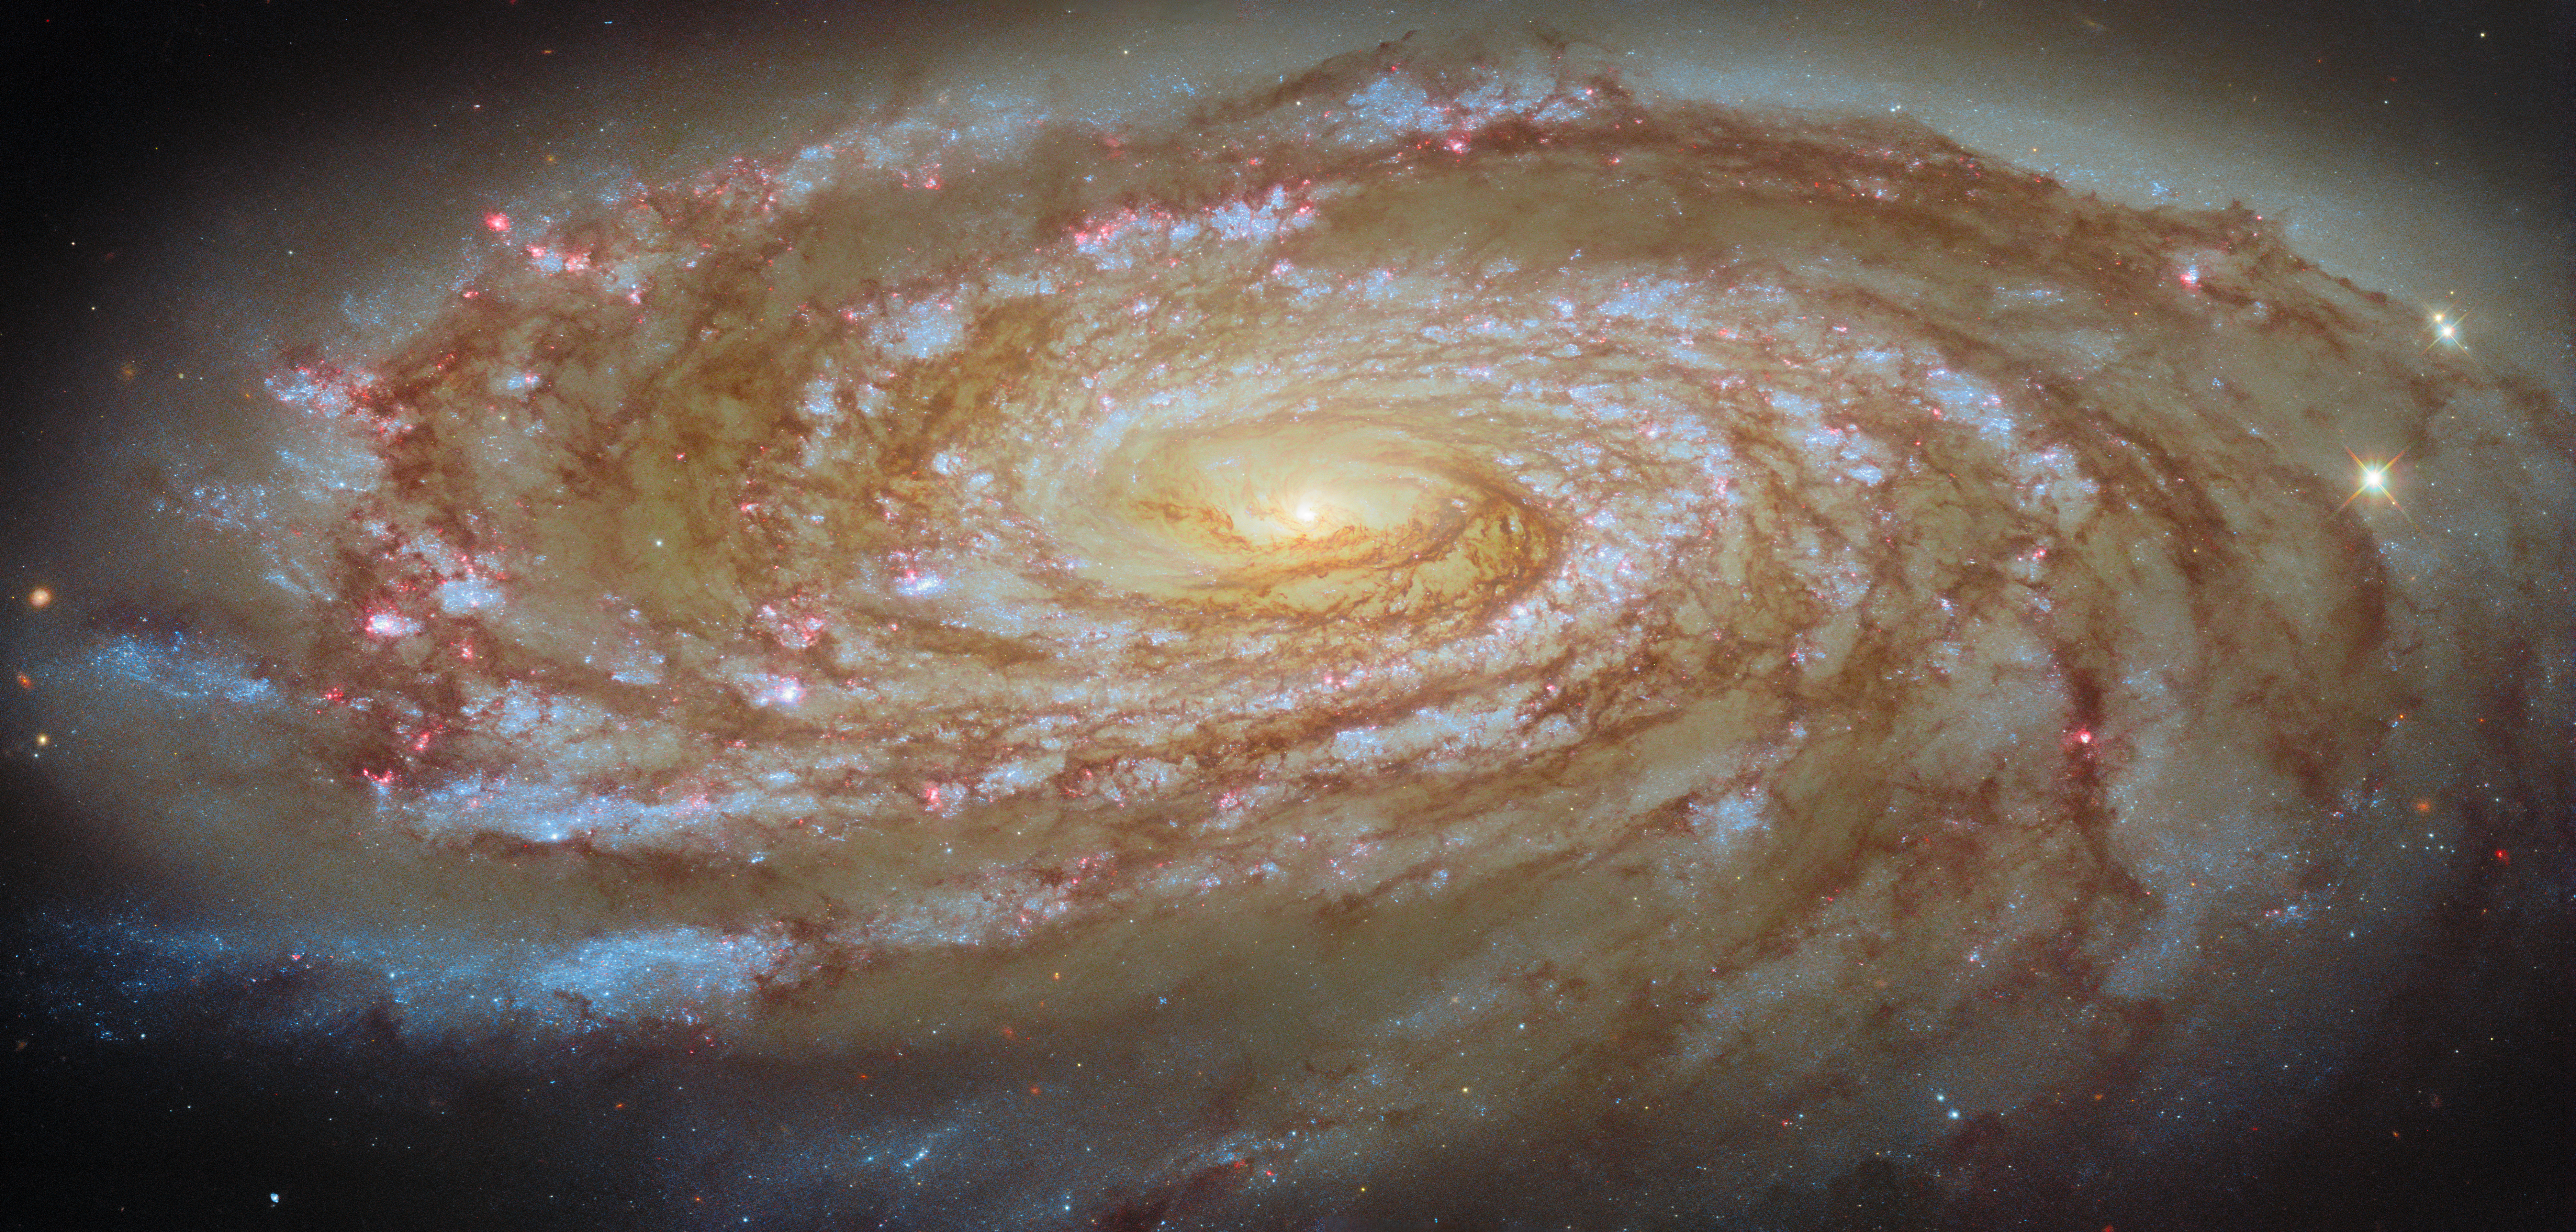

Journey to the centre of a galaxy cluster

The focus of today’s ESA/Hubble Picture of the Month is an active spiral galaxy on a journey lasting hundreds of millions of years. The galaxy Messier 88 (M88), which is also known as NGC 4501, is located about 63 million light-years away in the constellation Coma Berenices (Berenice’s Hair).

M88 is an active galaxy, which means that its centre harbours a supermassive black hole that is snacking on gas and dust. This black hole is estimated to be around 100 million times as massive as the Sun, and it appears to be powering outflows of gas from the galaxy’s centre.

Around this black hole is a population of old, reddish stars that give M88 its warmly glowing heart. Spreading out from the centre are several tightly wound, symmetrical spiral arms, each outlined by sparkling pink and blue star clusters and knotted clouds of dust. We see M88 from an angle so that it appears elongated, and its spiral arms delicately fan out before it.

M88 is a member of the Virgo Cluster, a collection of more than a thousand galaxies held together by gravity — and therefore linked by fate. As this massive group of galaxies moves through space, the galaxies themselves are in constant motion as they orbit the cluster’s centre of gravity. M88 itself is on a long and somewhat perilous cosmic journey that will bring it to the innermost reaches of the cluster.

As is the case with any epic journey, M88 will be fundamentally changed by its trek to the centre of the Virgo Cluster, about 2 million light-years from where it is today. In 200–300 million years, M88 will make its closest approach to Messier 87, the massive elliptical galaxy that anchors the entire cluster. As it draws close to this gravitational behemoth, M88 will experience intense ram pressure stripping. Ram pressure stripping is a process through which a galaxy’s gas is swept away as it pushes through the ever-present gas between the galaxies in a cluster.

Researchers have already seen this process at work in M88. The galaxy’s swirling disc of gas is truncated, and it appears to have been compressed on the leading edge of the galaxy, piling up like snow before a plough. In fact, M88 appears to have considerably less cold gas — the raw fuel for star formation — than expected for a galaxy of its size, especially in its outer regions. This is a clear sign that M88 will be altered by its journey, which will affect its ability to form stars and alter the course of its evolution.

Astronomers observed M88 with Hubble as part of an observing programme (#18103; PI: D. Thilker) dedicated to understanding the lives of spiral galaxies in crowded environments. This programme uses Hubble’s highly capable Wide Field Camera 3, which can finely resolve individual star clusters and nebulae in galaxies tens of millions of light-years away. By studying galaxies on these scales, astronomers can understand how a journey through a cluster impacts galaxies’ evolution and ability to form new stars.

Credit: ESA/Hubble & NASA, D. Thilker and the MAUVE-HST Team